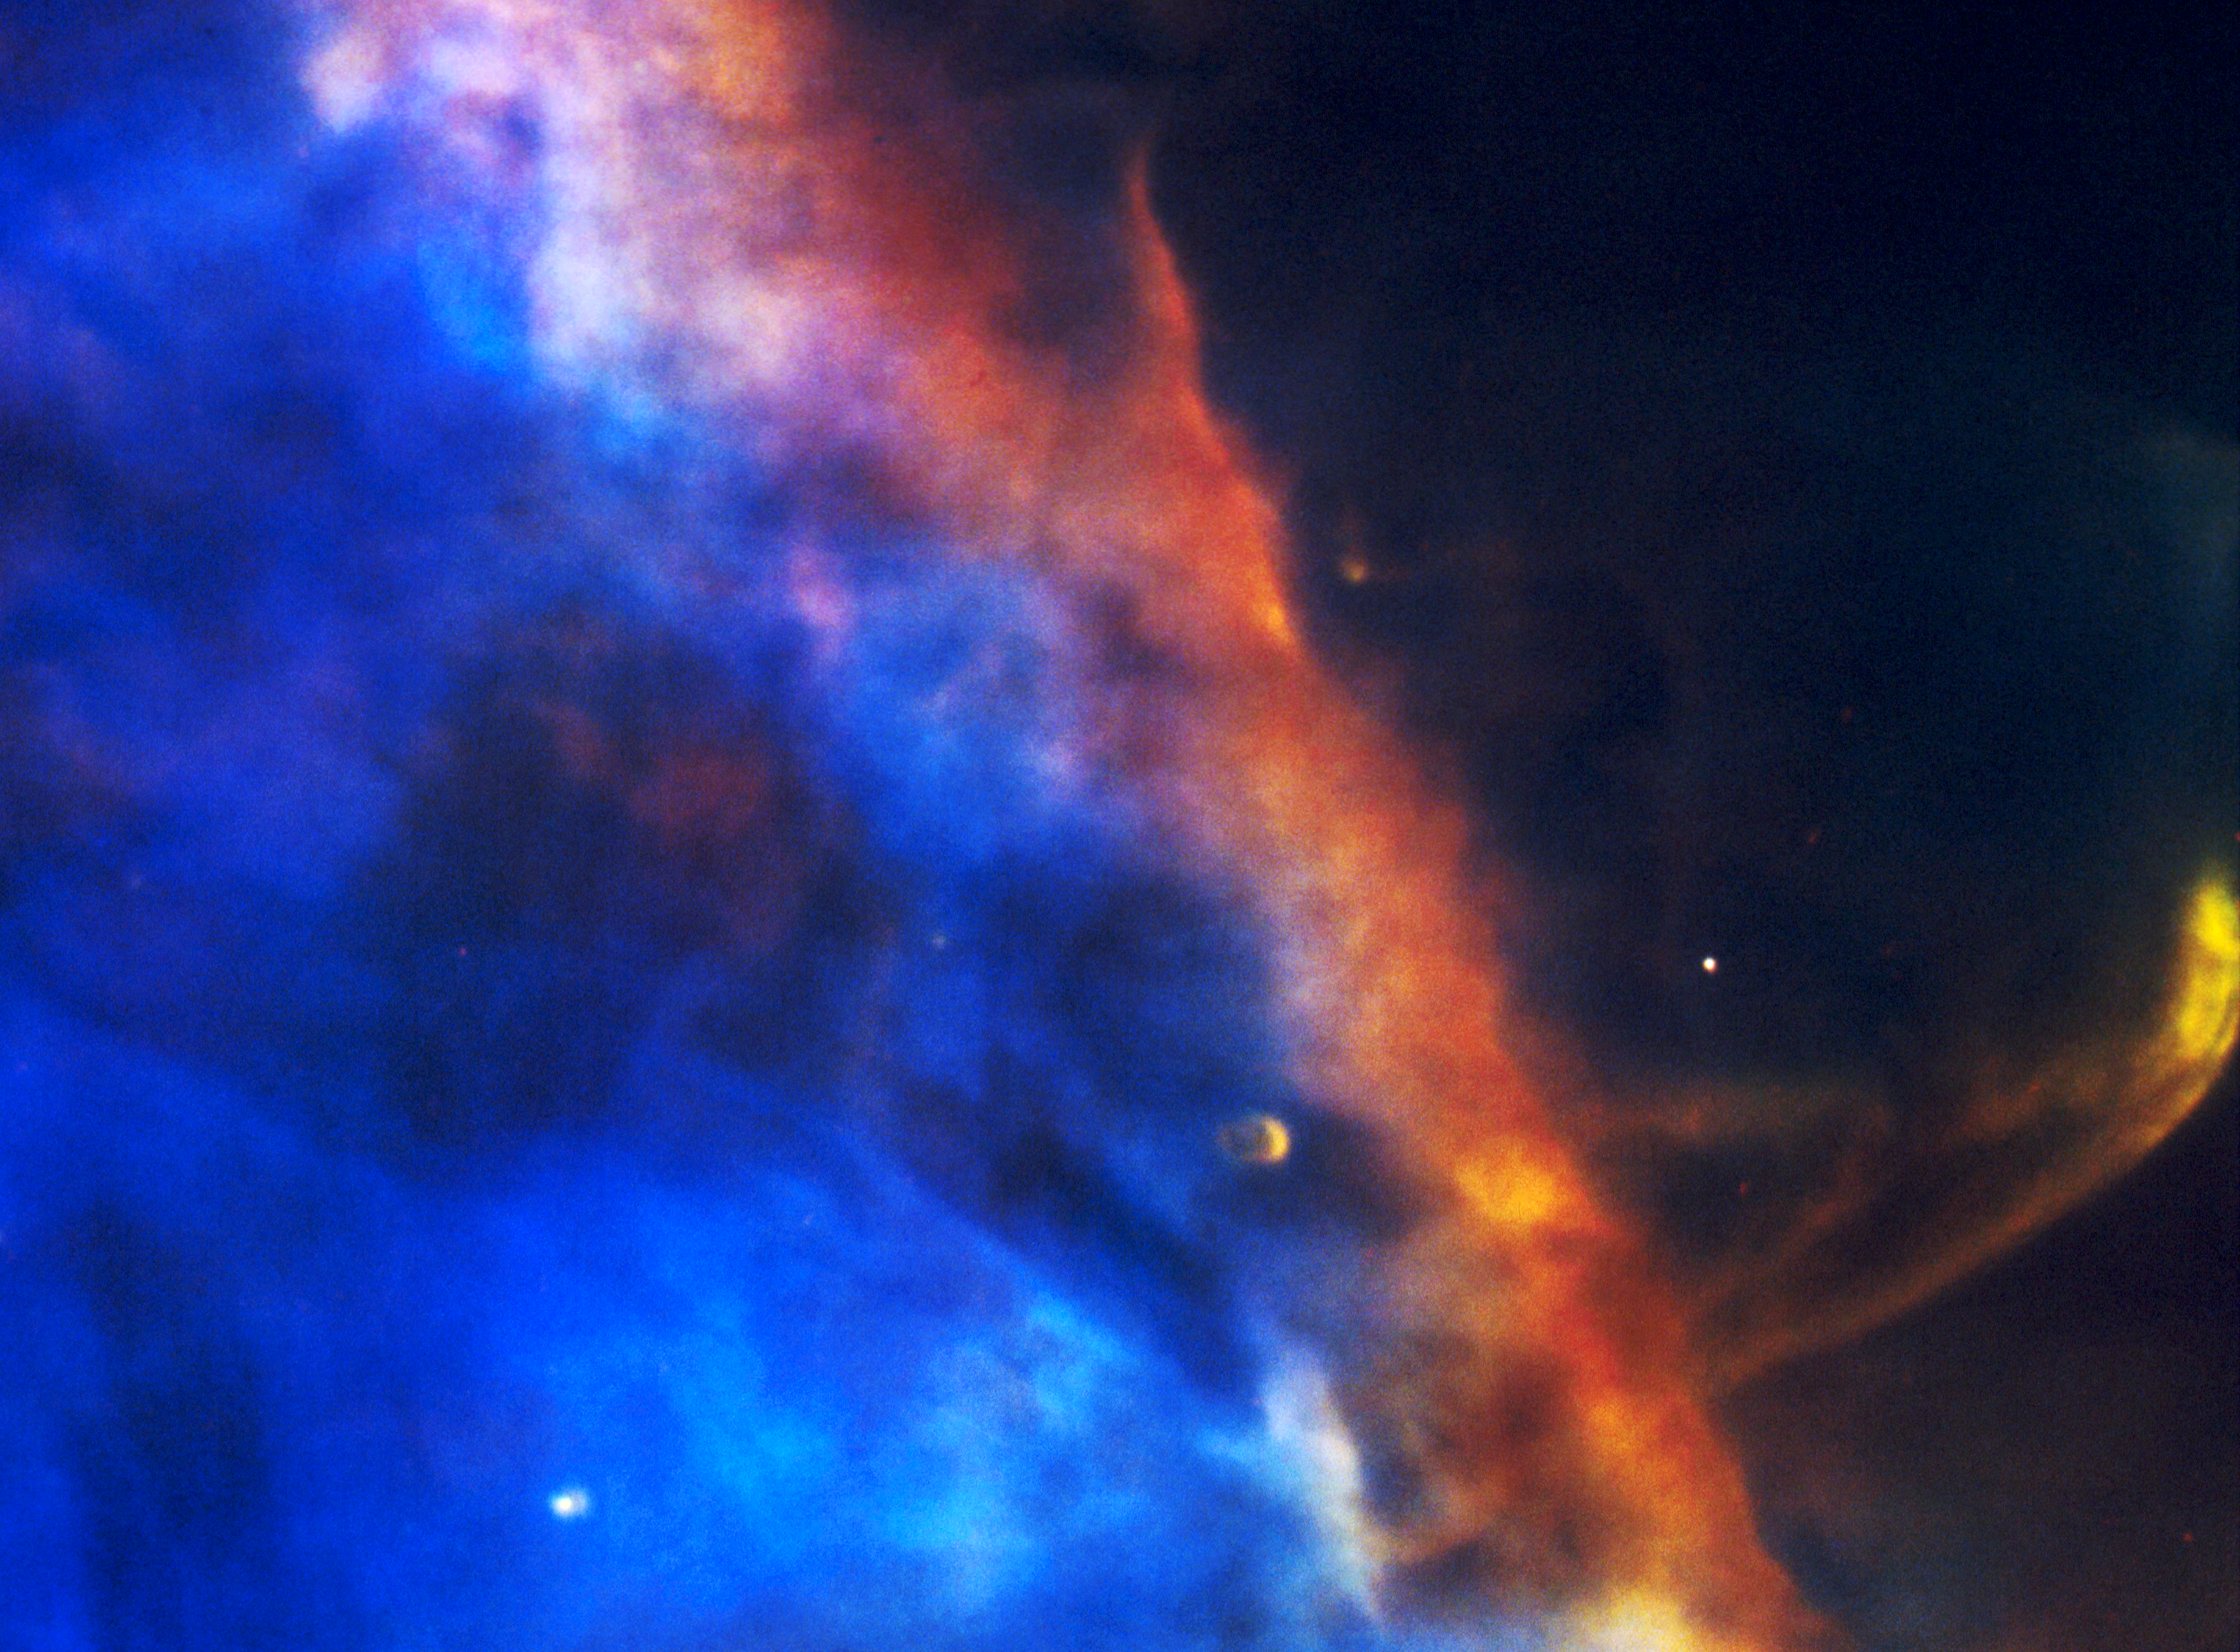

Gas Plume From a Newborn Star

A NASA Hubble Space Telescope picture of a hypersonic shock wave (lower right) of material moving at 148,000 miles per hour in the Orion Nebula, a star-forming region 1,500 light-years away.

Studies of similar objects infer that such highly supersonic shock waves are formed by a beam of material coming out of newly formed stars.

The plume is only 1,500 years old. The image is 112 light-year across.

This color photograph is a composite of separate images taken at the wavelengths of the two abundant elements in the nebula: Hydrogen and Oxygen. The images were taken with HST's Wide Field and Planetary Camera (in wide field mode), on August 13 and 14, 1991.

Credit: C.R. O'Dell (Rice University), and NASA